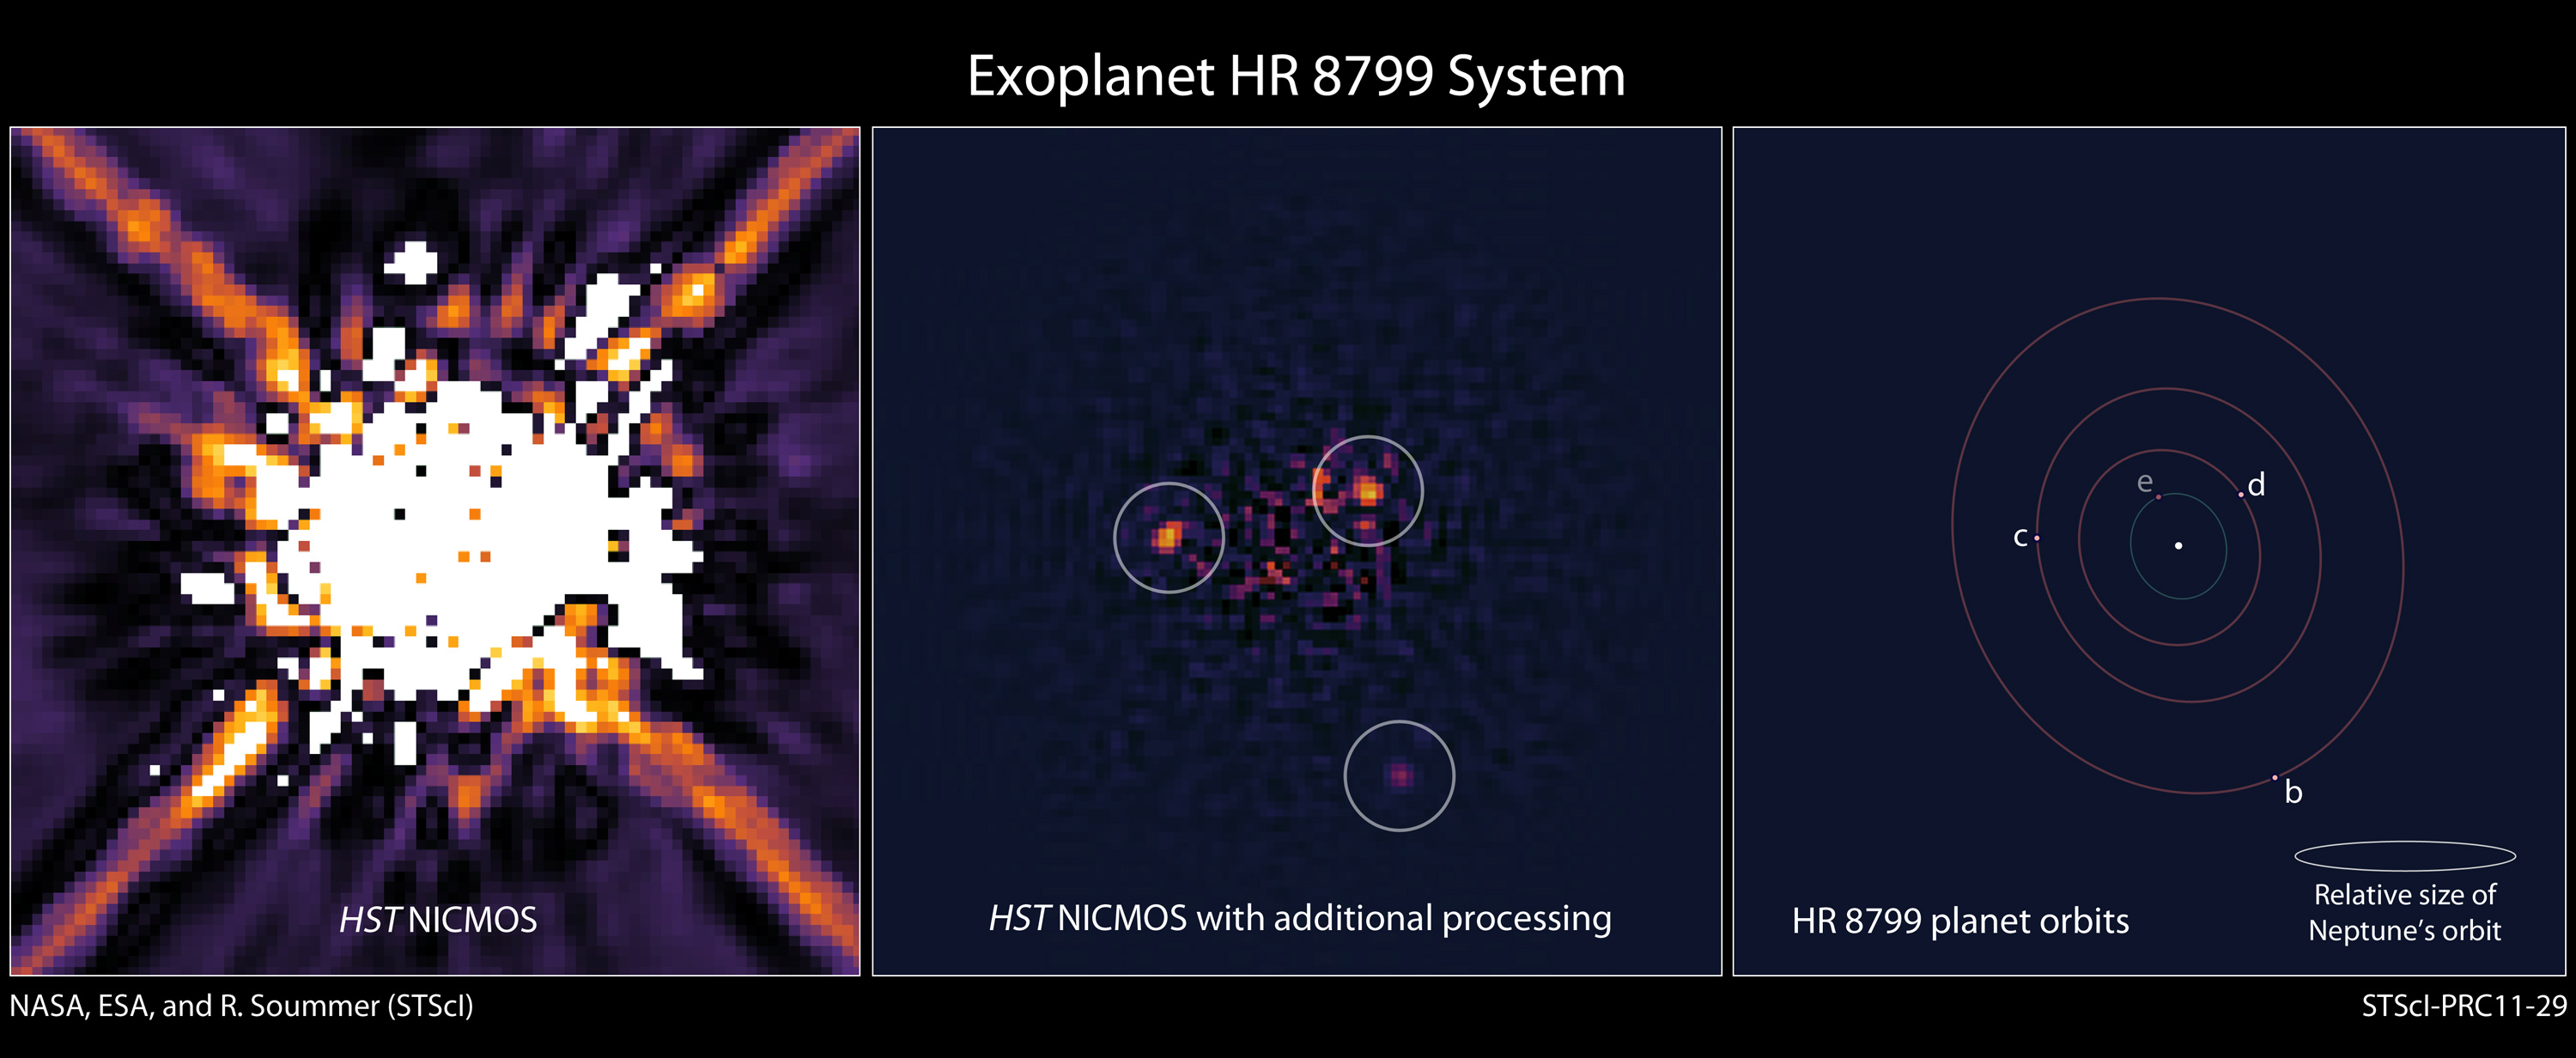

HR 8799 exoplanet system

Left: This is an image of the star HR 8799 taken by Hubble's Near Infrared Camera and Multi-Object Spectrometer (NICMOS) in 1998. A mask within the camera (coronagraph) blocks most of the light from the star. In addition, software has been used to digitally subtract more starlight. Nevertheless, scattered light from HR 8799 dominates the image, obscuring the faint planets.

Center: Recent, sophisticated software processing of the NICMOS data removes most of the scattered starlight to reveal three planets orbiting HR 8799. Astronomers used this decade-old image to calculate the orbits of the planets.

Right: This is an illustration of the HR 8799 exoplanet system based on the reanalysis of Hubble NICMOS data and ground-based observations. The positions of the star and the orbits of the four known planets are shown schematically. The sizes of the dots are not to scale with the planet's true sizes. The three outermost planets, b, c, and d, are detected in both the NICMOS and ground-based data. A fourth, inner planet, e, was detected in ground-based observations. The orbits appear elongated because of a slight tilt of the plane of the orbits relative to our line of sight. The size of the HR 8799 planetary system is comparable to our solar system, as indicated by the orbit of Neptune, shown to scale.

Credit: NASA, ESA, and R. Soummer (STScI)